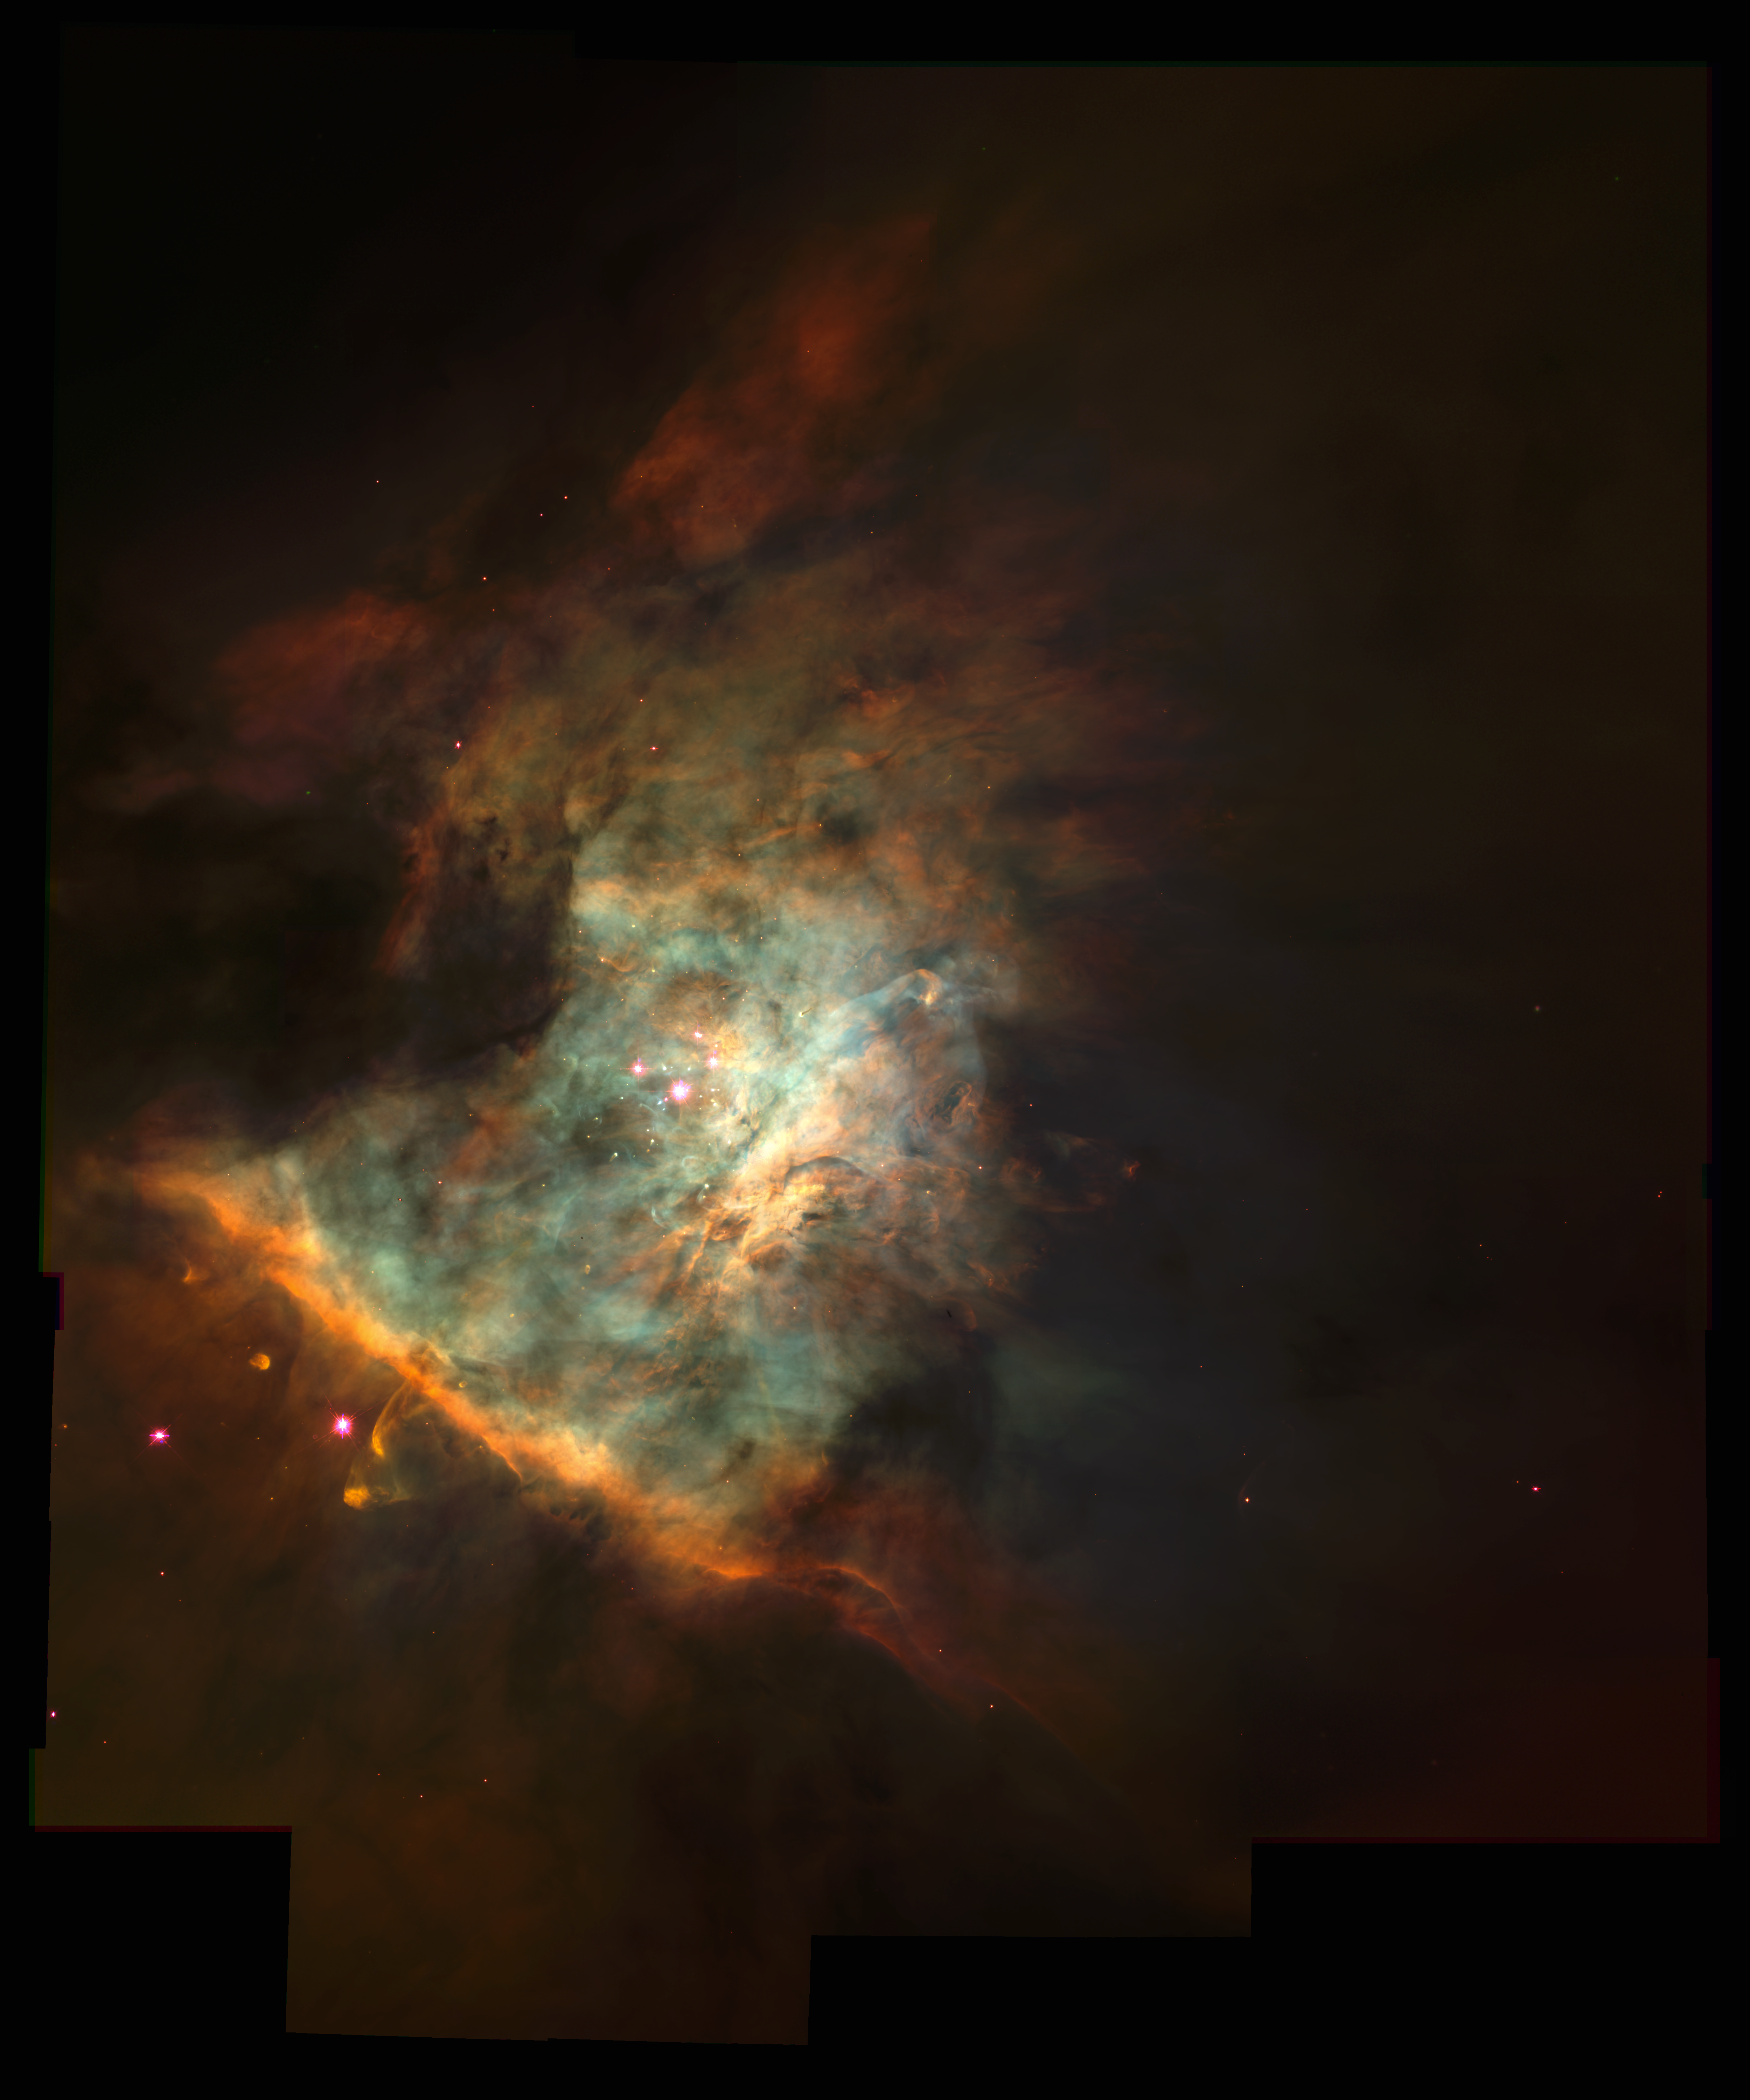

The Center of the Orion Nebula

This spectacular colour panorama of the centre the Orion nebula is one of the largest pictures ever assembled from individual images taken with the Hubble Space Telescope. The picture, seamlessly composited from a mosaic of 15 separate fields, covers an area of sky about five percent the area covered by the full Moon.

Credit: C.R. O'Dell (Rice University), and NASA/ESA